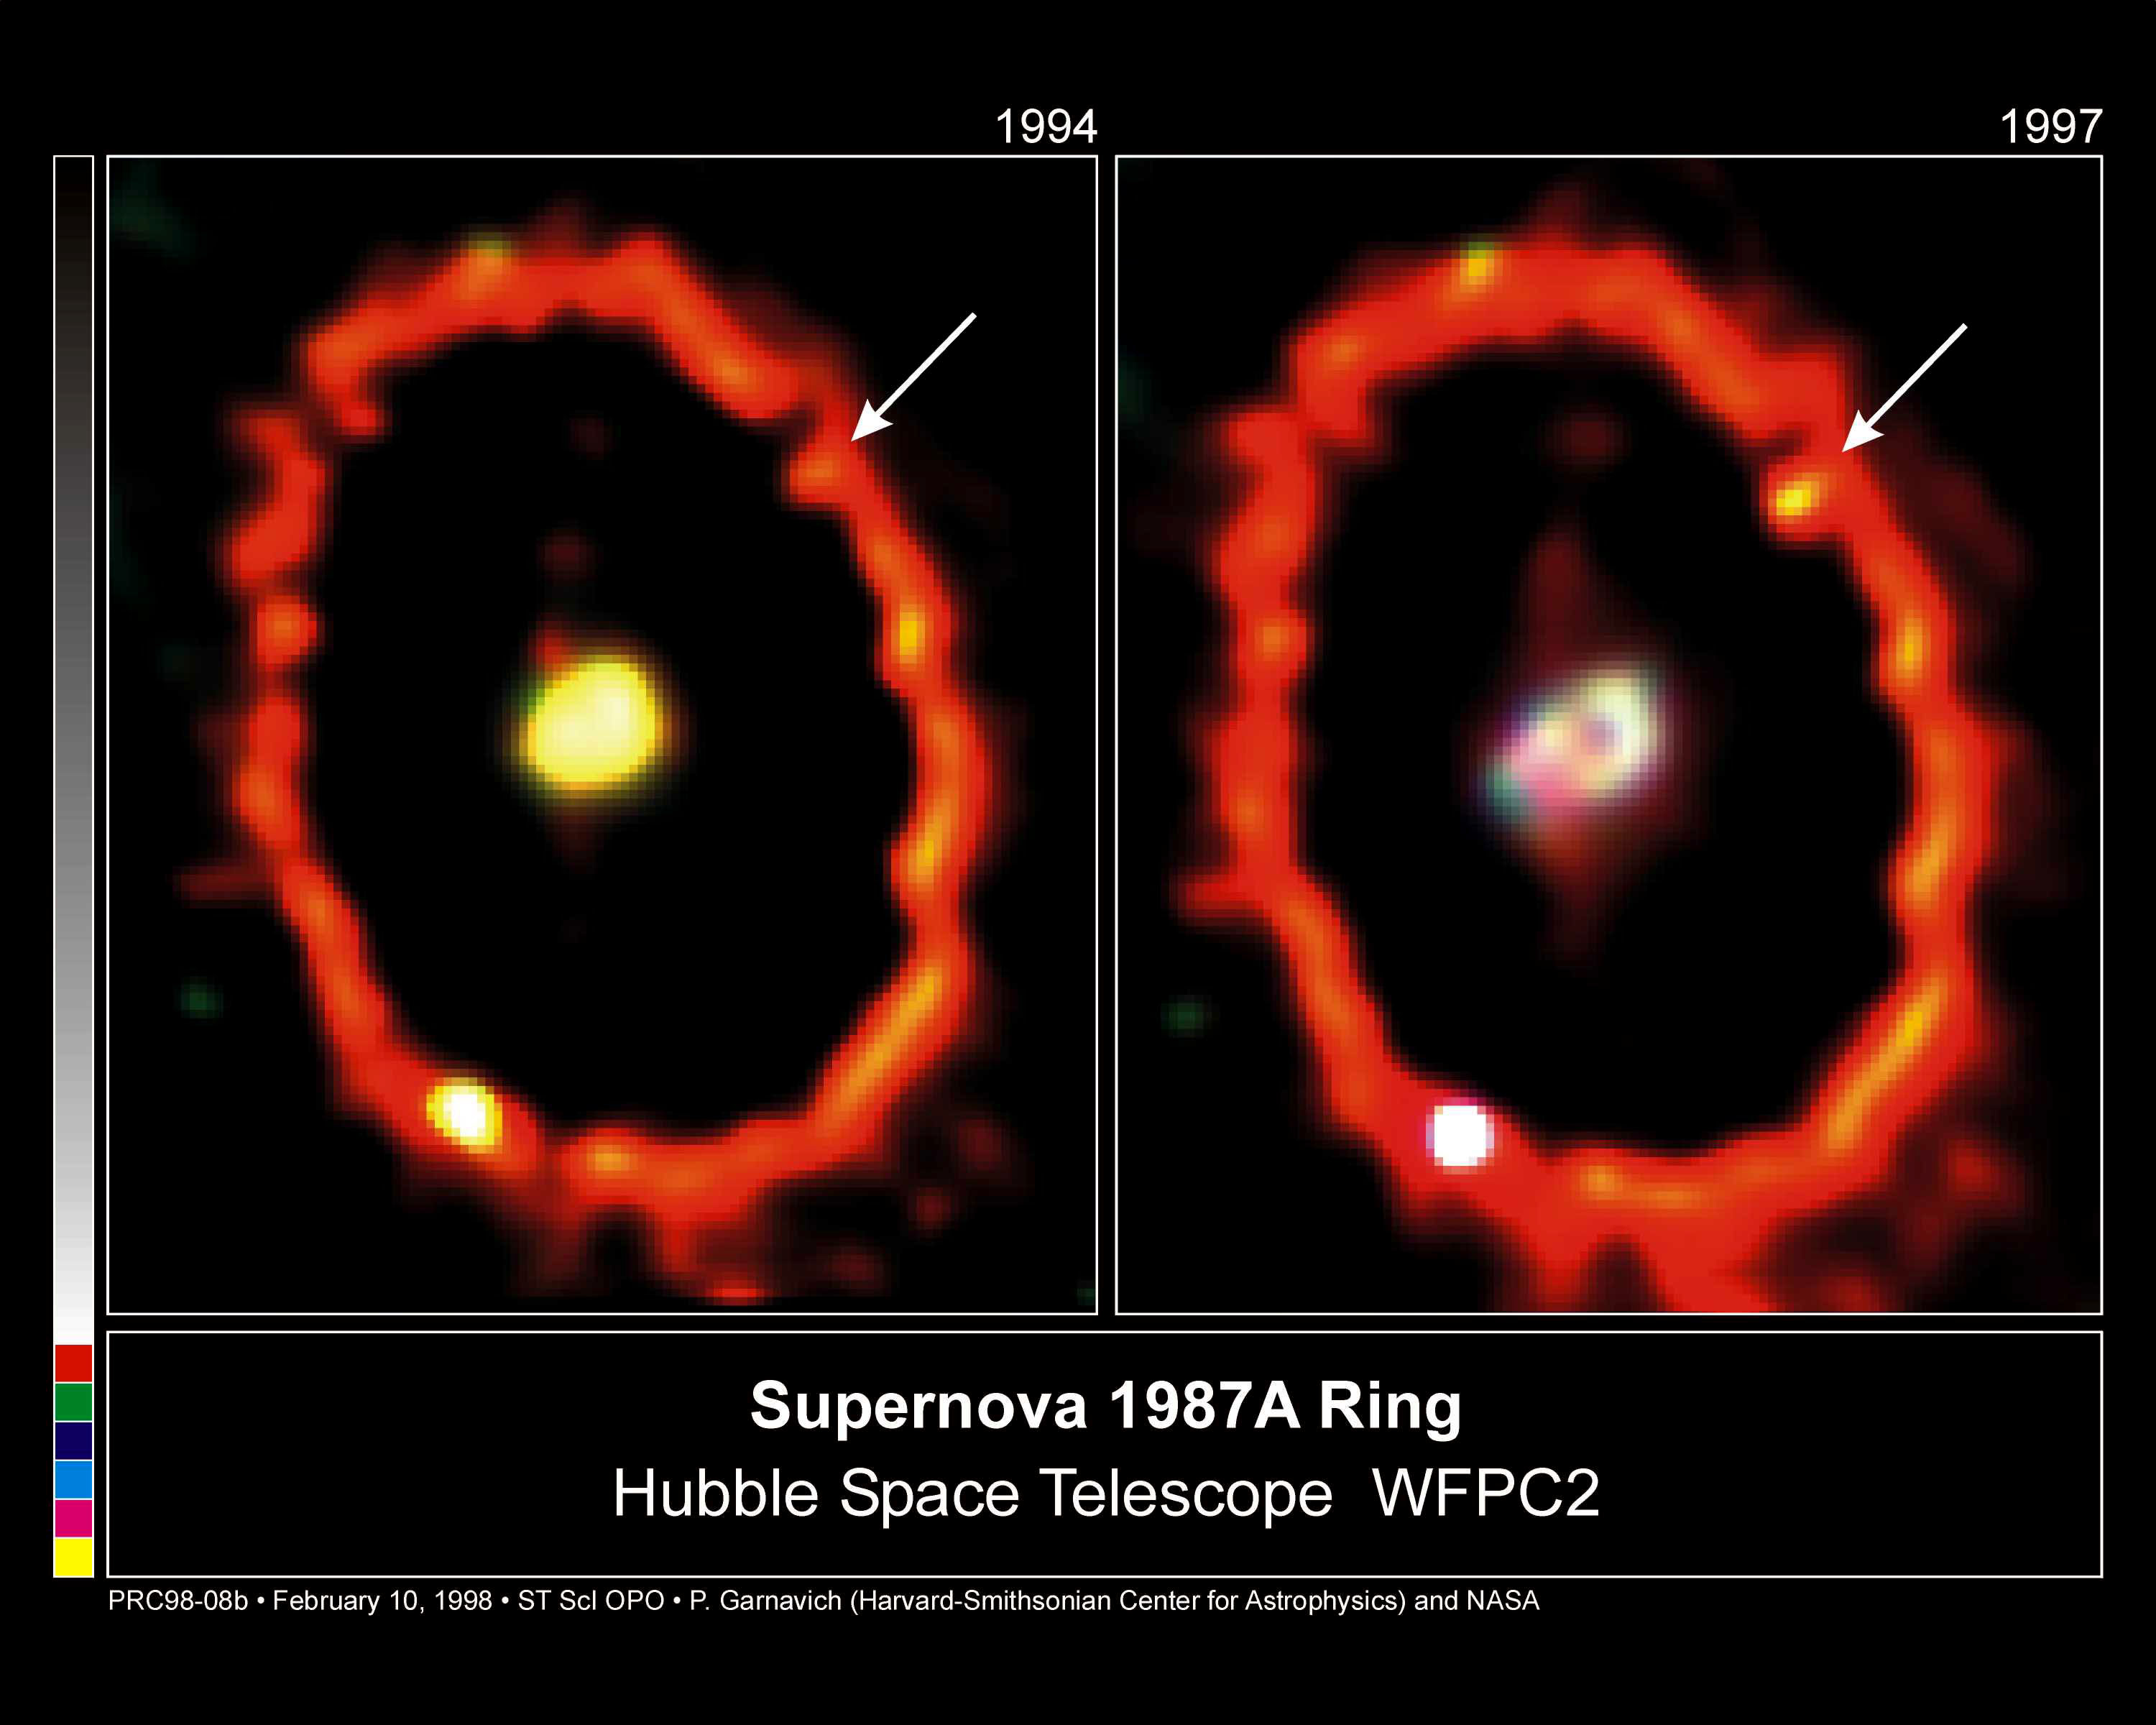

Supernova 1987a Ring

Recent Hubble telescope observations show a brightening knot on the upper right side of the ring. This is the site of a powerful collision between an outward moving blast wave and the innermost parts of the circumstellar ring. The collision heats the gas and has caused it to brighten in recent months. This is likely to be the first sign of a dramatic and violent collision that will take place over the next few years, rejuvenating SN1987A as a powerful source of X-ray and radio emissions.

Credit: Peter Garnavich (Harvard-Smithsonian Center for Astrophysics), andNASA/ESA